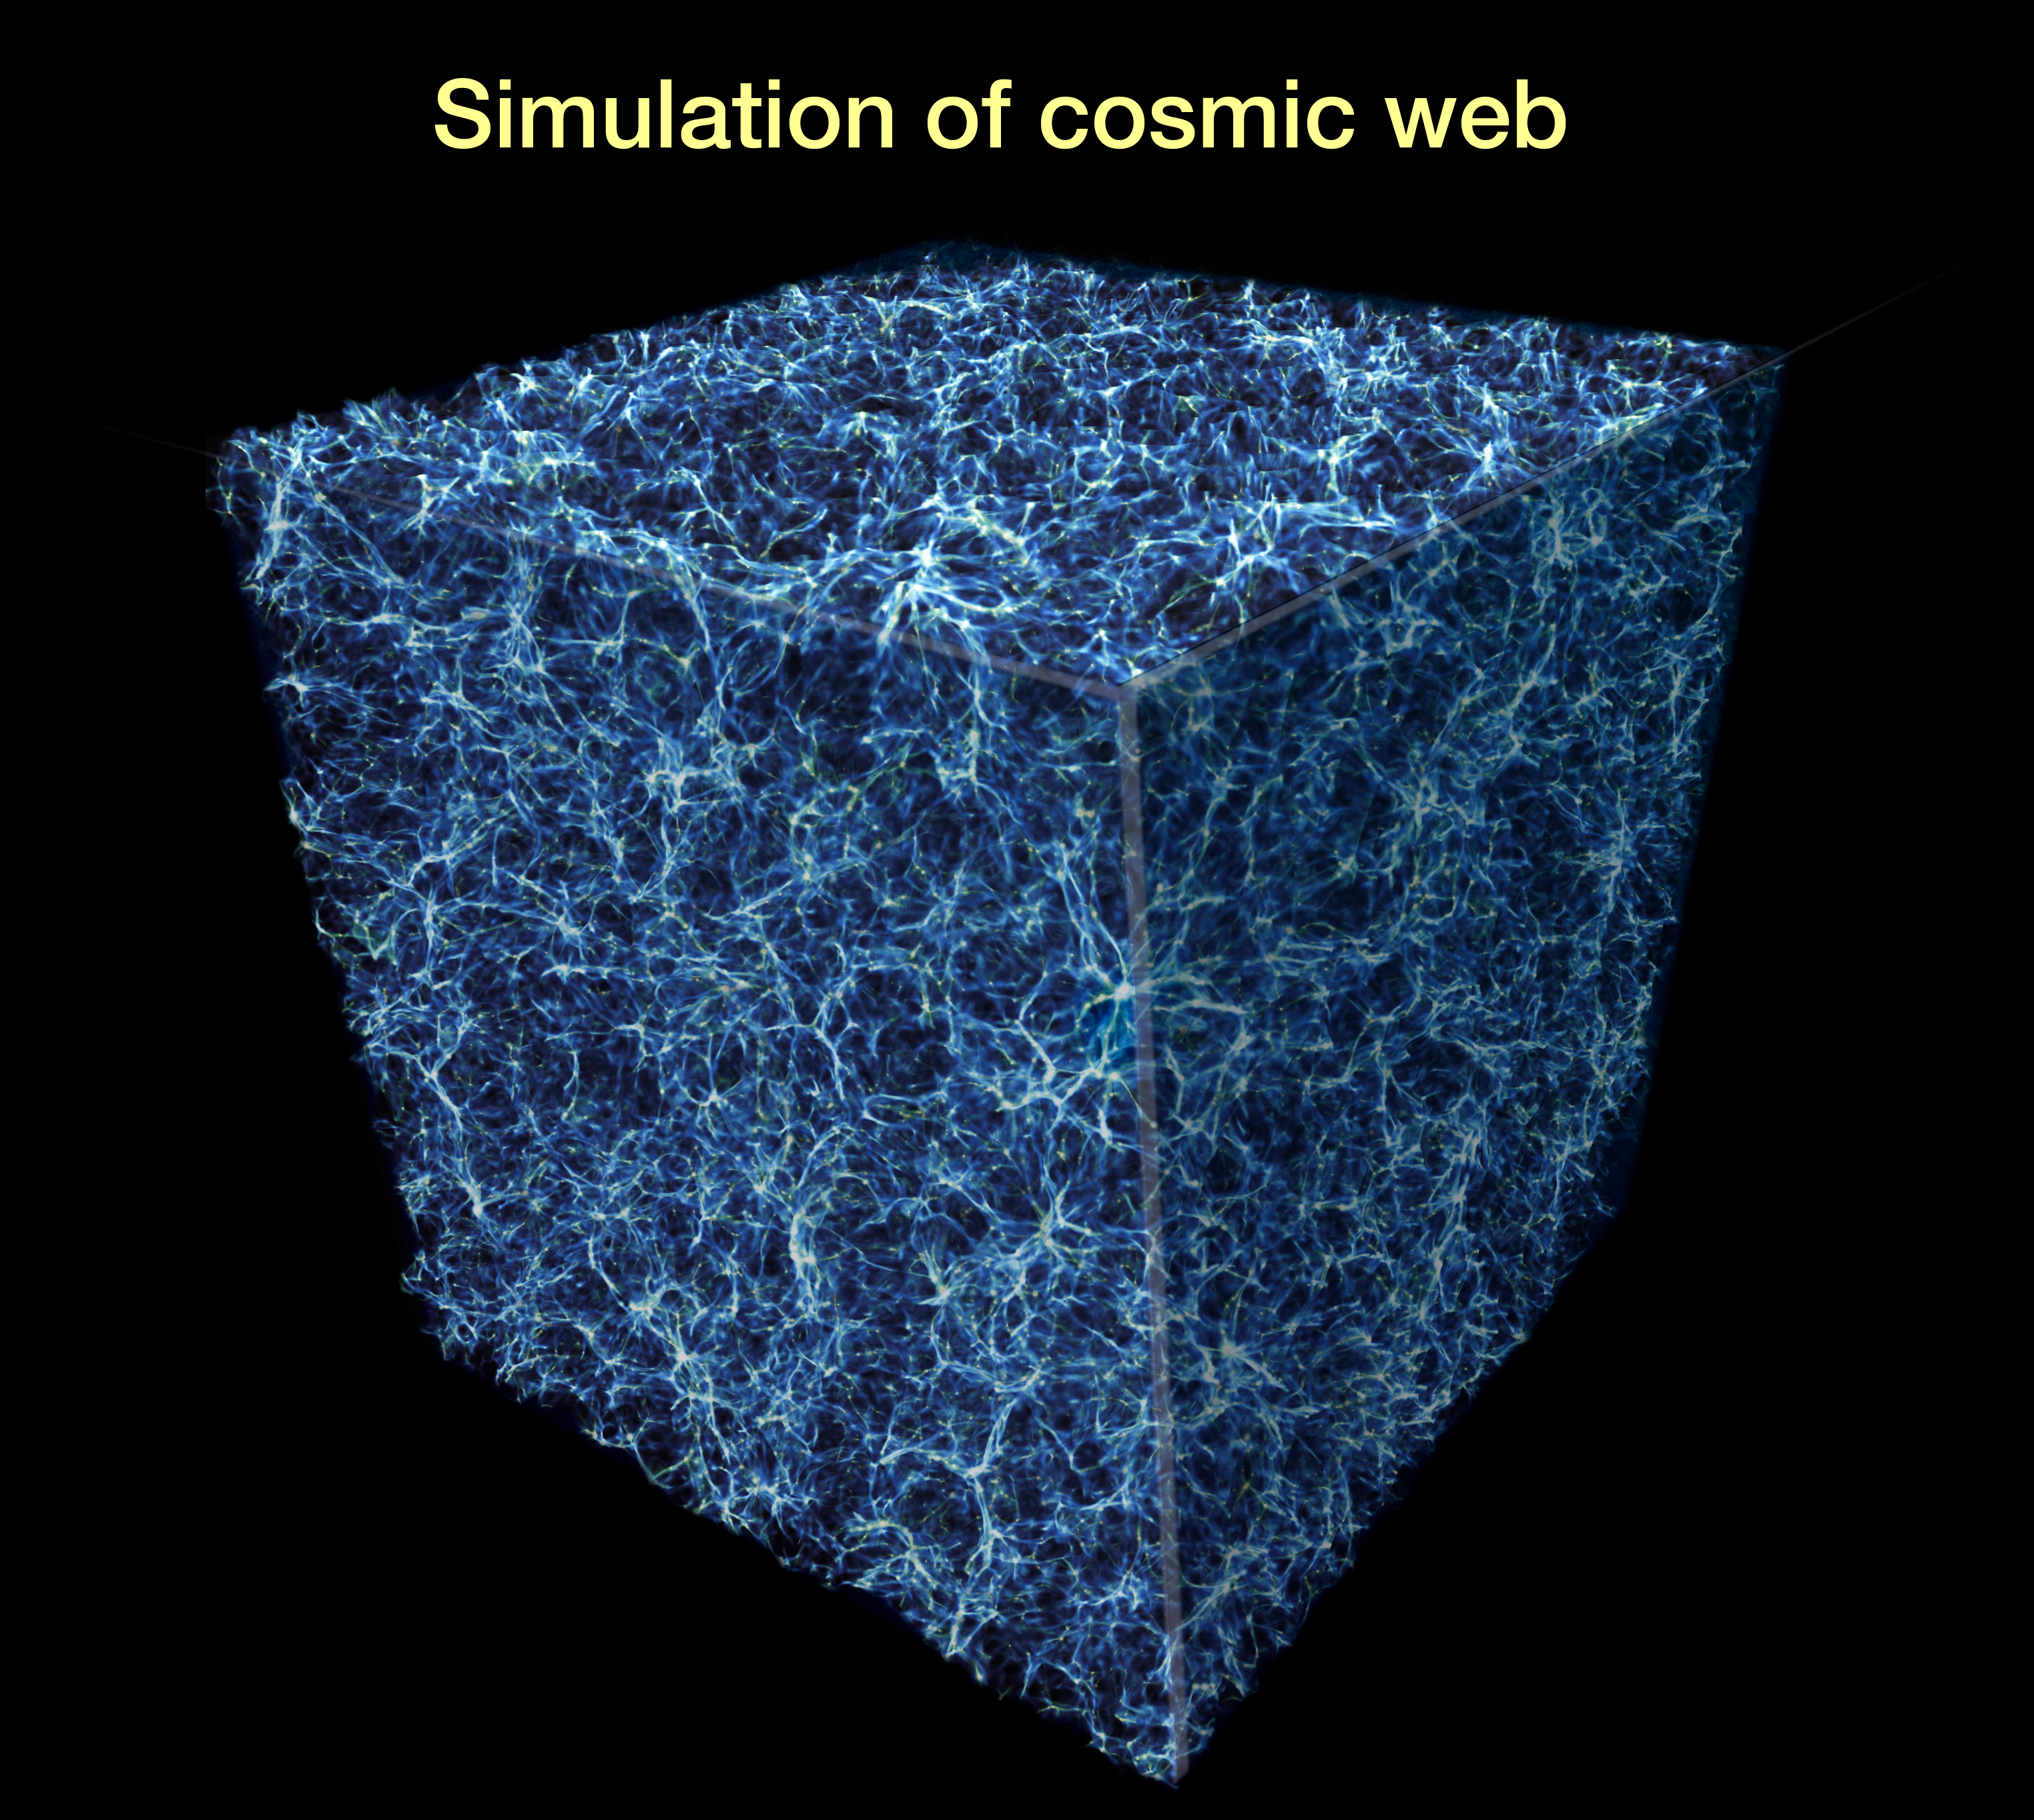

Probing the cosmic web

This graphic represents a slice of the spider-web-like structure of the Universe, called the "cosmic web". These great filaments are made largely of dark matter located in the space between galaxies. The Hubble Space Telescope probed the structure of intergalactic space to look for missing ordinary matter, called baryons, that is gravitationally attracted to the cosmic web.

Credit: NASA, ESA, and E. Hallman (University of Colorado, Boulder)